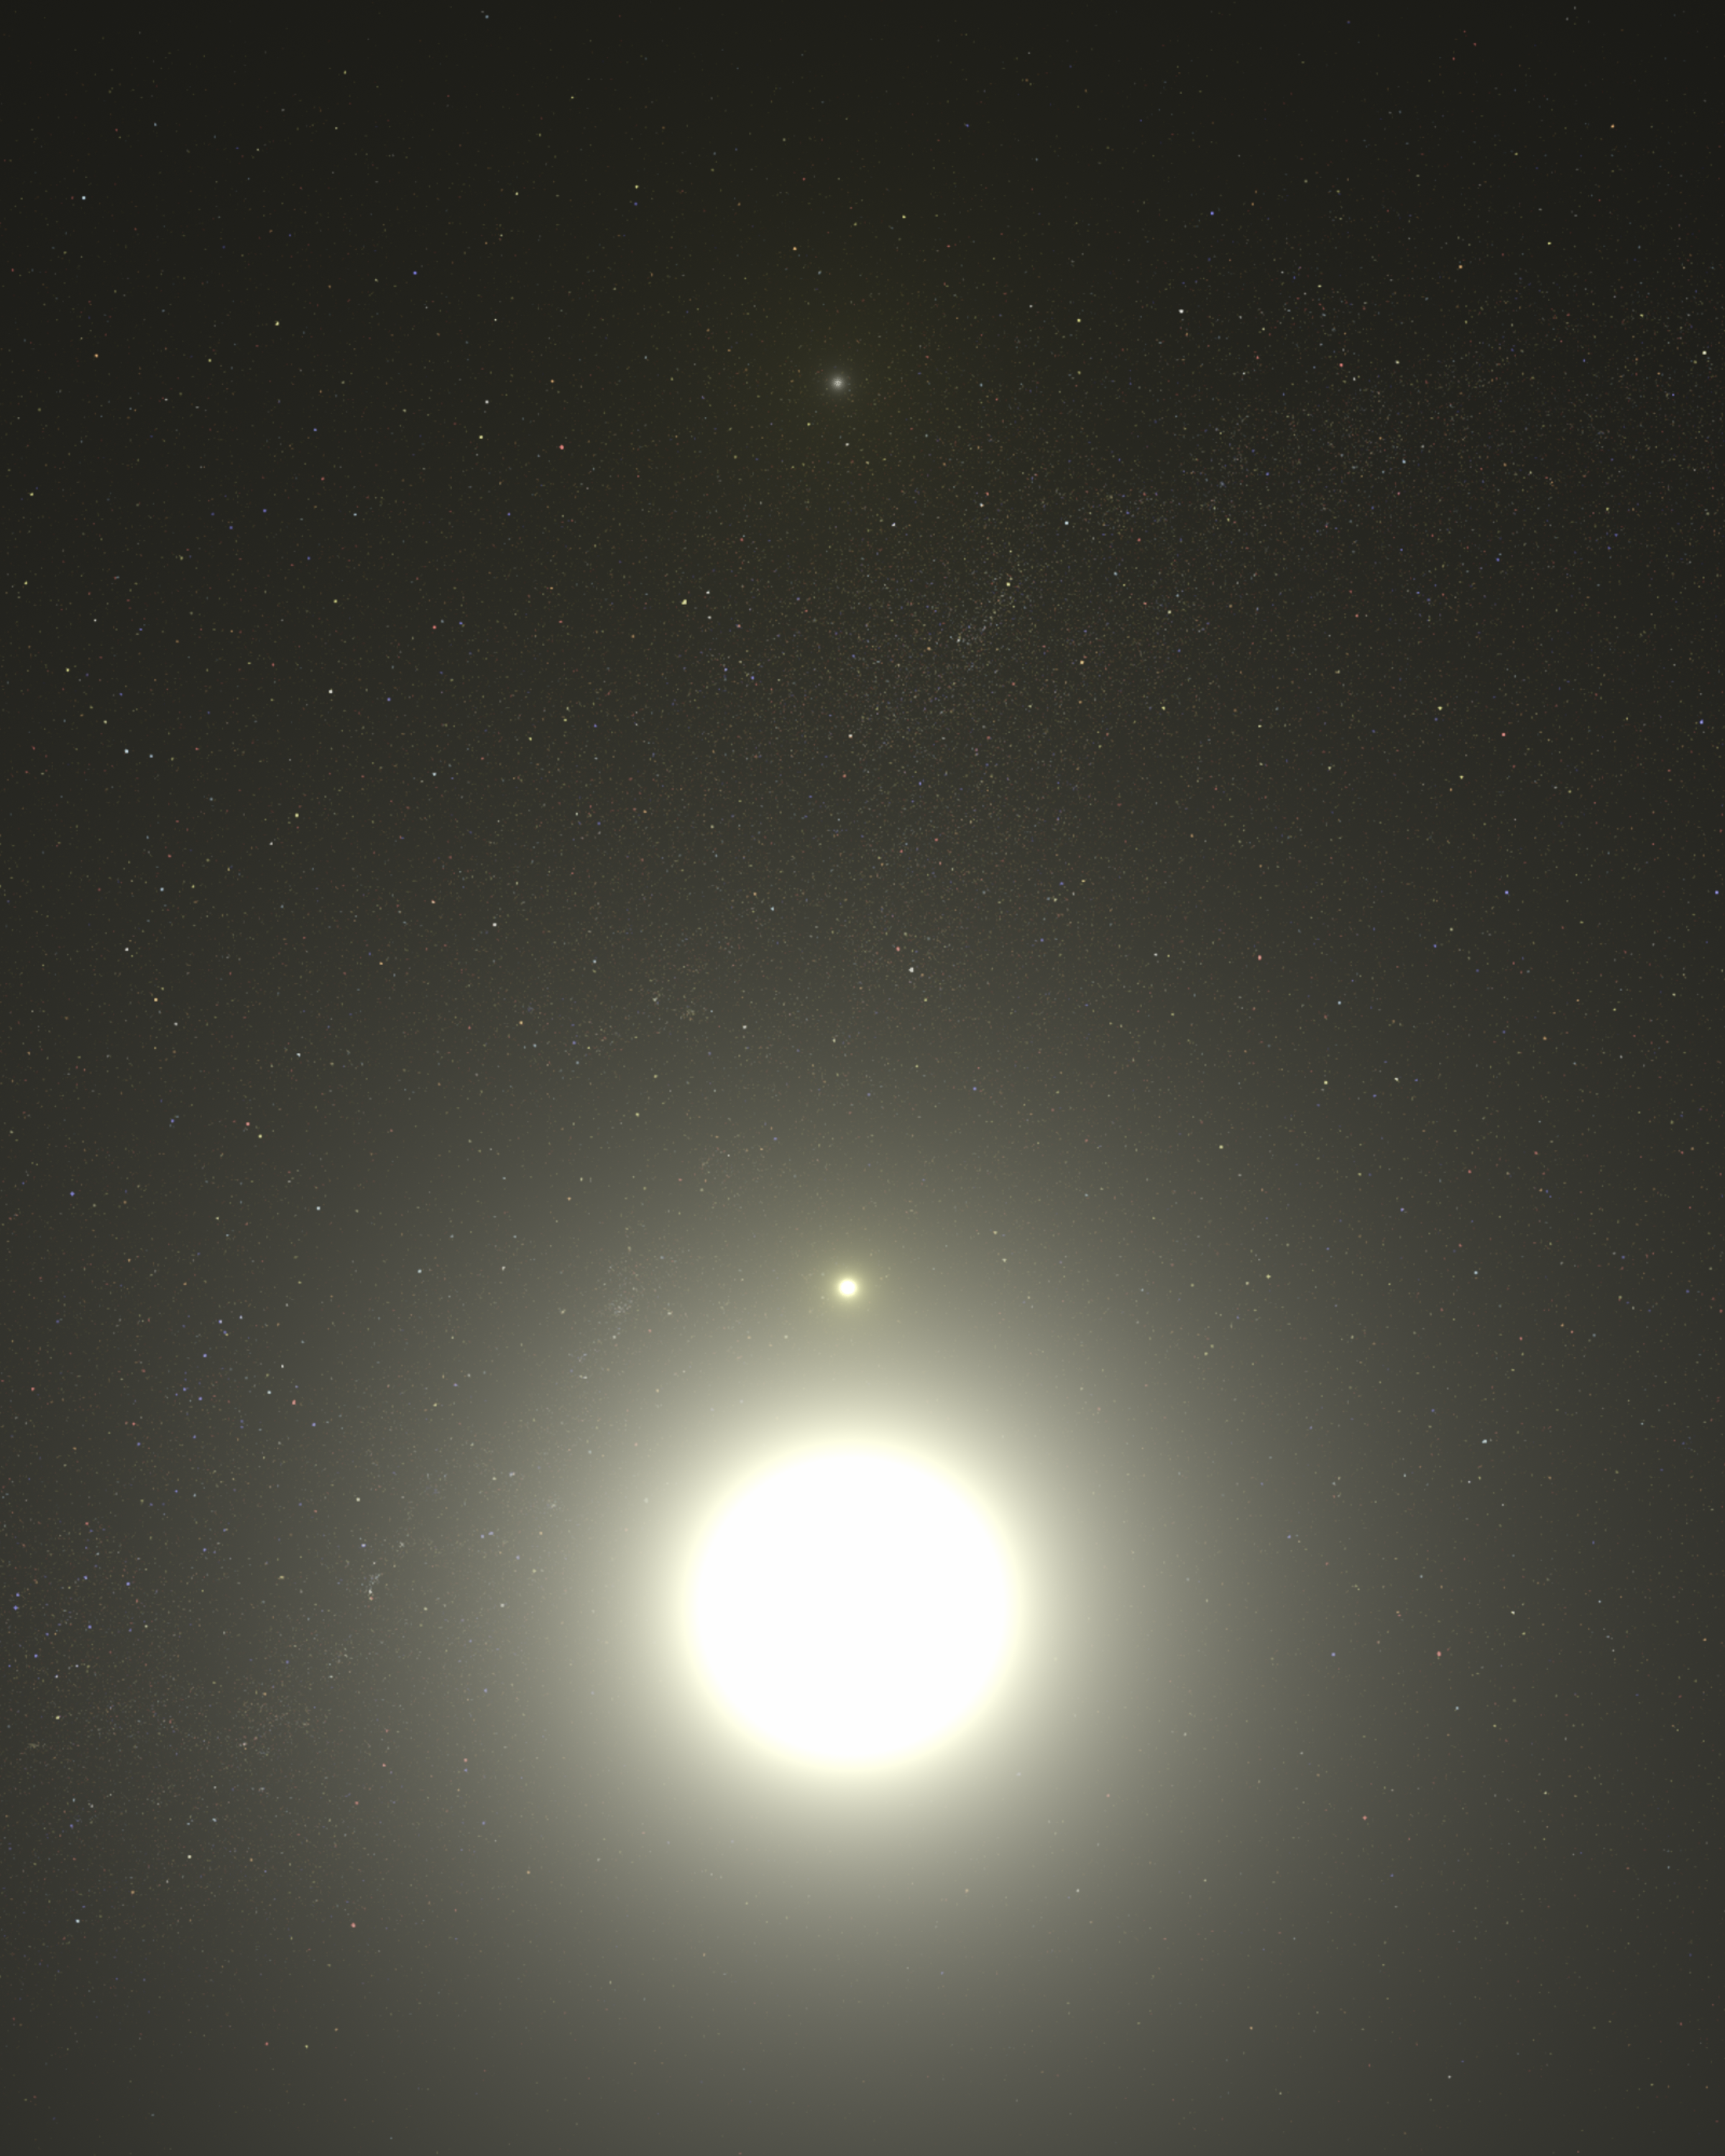

Artist's concept of Polaris system

This is a view from within the Polaris triple star system. The North Star, Polaris A is a bright supergiant variable star.

Just above Polaris is a small companion, Polaris Ab, which is 2 billion miles (about 3.2 billion kilometres) from Polaris. Much farther away, near the top of the illustration, is the wide companion Polaris B. Polaris B is located approximately 240 billion miles (about 386 billion kilometres) from Polaris A. The two companion stars are the same temperature as Polaris A, but are dwarf stars.

Credit: NASA, ESA, G. Bacon (STScI)